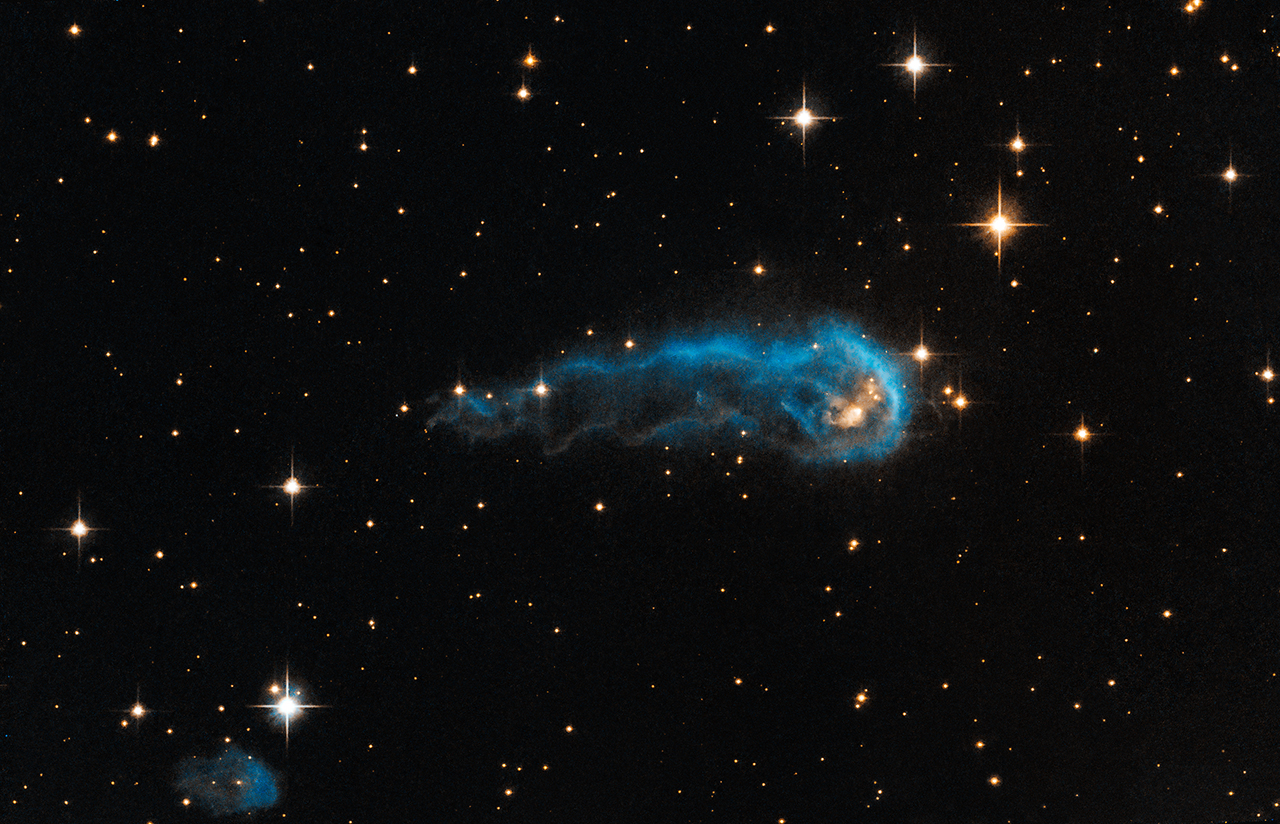

Hubble sees a cosmic caterpillar

This light-year-long knot of interstellar gas and dust resembles a caterpillar on its way to a feast. But the meat of the story is not only what this cosmic caterpillar eats for lunch, but also what's eating it. Harsh winds from extremely bright stars are blasting ultraviolet radiation at this "wanna-be" star and sculpting the gas and dust into its long shape.

The culprits are 65 of the hottest, brightest known stars, classified as O-type stars, located 15 light-years away from the knot, towards the right edge of the image. These stars, along with 500 less bright, but still highly luminous, B-type stars make up what is called the Cygnus OB2 association. Collectively, the association is thought to have a mass more than 30 000 times that of our Sun.

The caterpillar-shaped knot, called IRAS 20324+4057, is a protostar in a very early evolutionary stage. It is still in the process of collecting material from an envelope of gas surrounding it. However, that envelope is being eroded by the radiation from Cygnus OB2. Protostars in this region should eventually become young stars with final masses about one to ten times that of our Sun, but if the eroding radiation from the nearby bright stars destroys the gas envelope before the protostars finish collecting mass, their final masses may be reduced.

Spectroscopic observations of the central star within IRAS 20324+4057 show that it is still collecting material quite heavily from its outer envelope, hoping to bulk up. Only time will tell if the formed star will be a "heavy-weight" or a "light-weight" with respect to its mass.

This image of IRAS 20324+4057 is a composite of Hubble Advanced Camera for Surveys (ACS) data taken in green and infrared light in 2006, and ground-based hydrogen data from the Isaac Newton Telescope in 2003, as part of the IPHAS H-alpha survey. The object lies 4500 light-years away in the constellation of Cygnus (The Swan).

Credit: NASA, ESA, the Hubble Heritage Team (STScI/AURA), and IPHAS